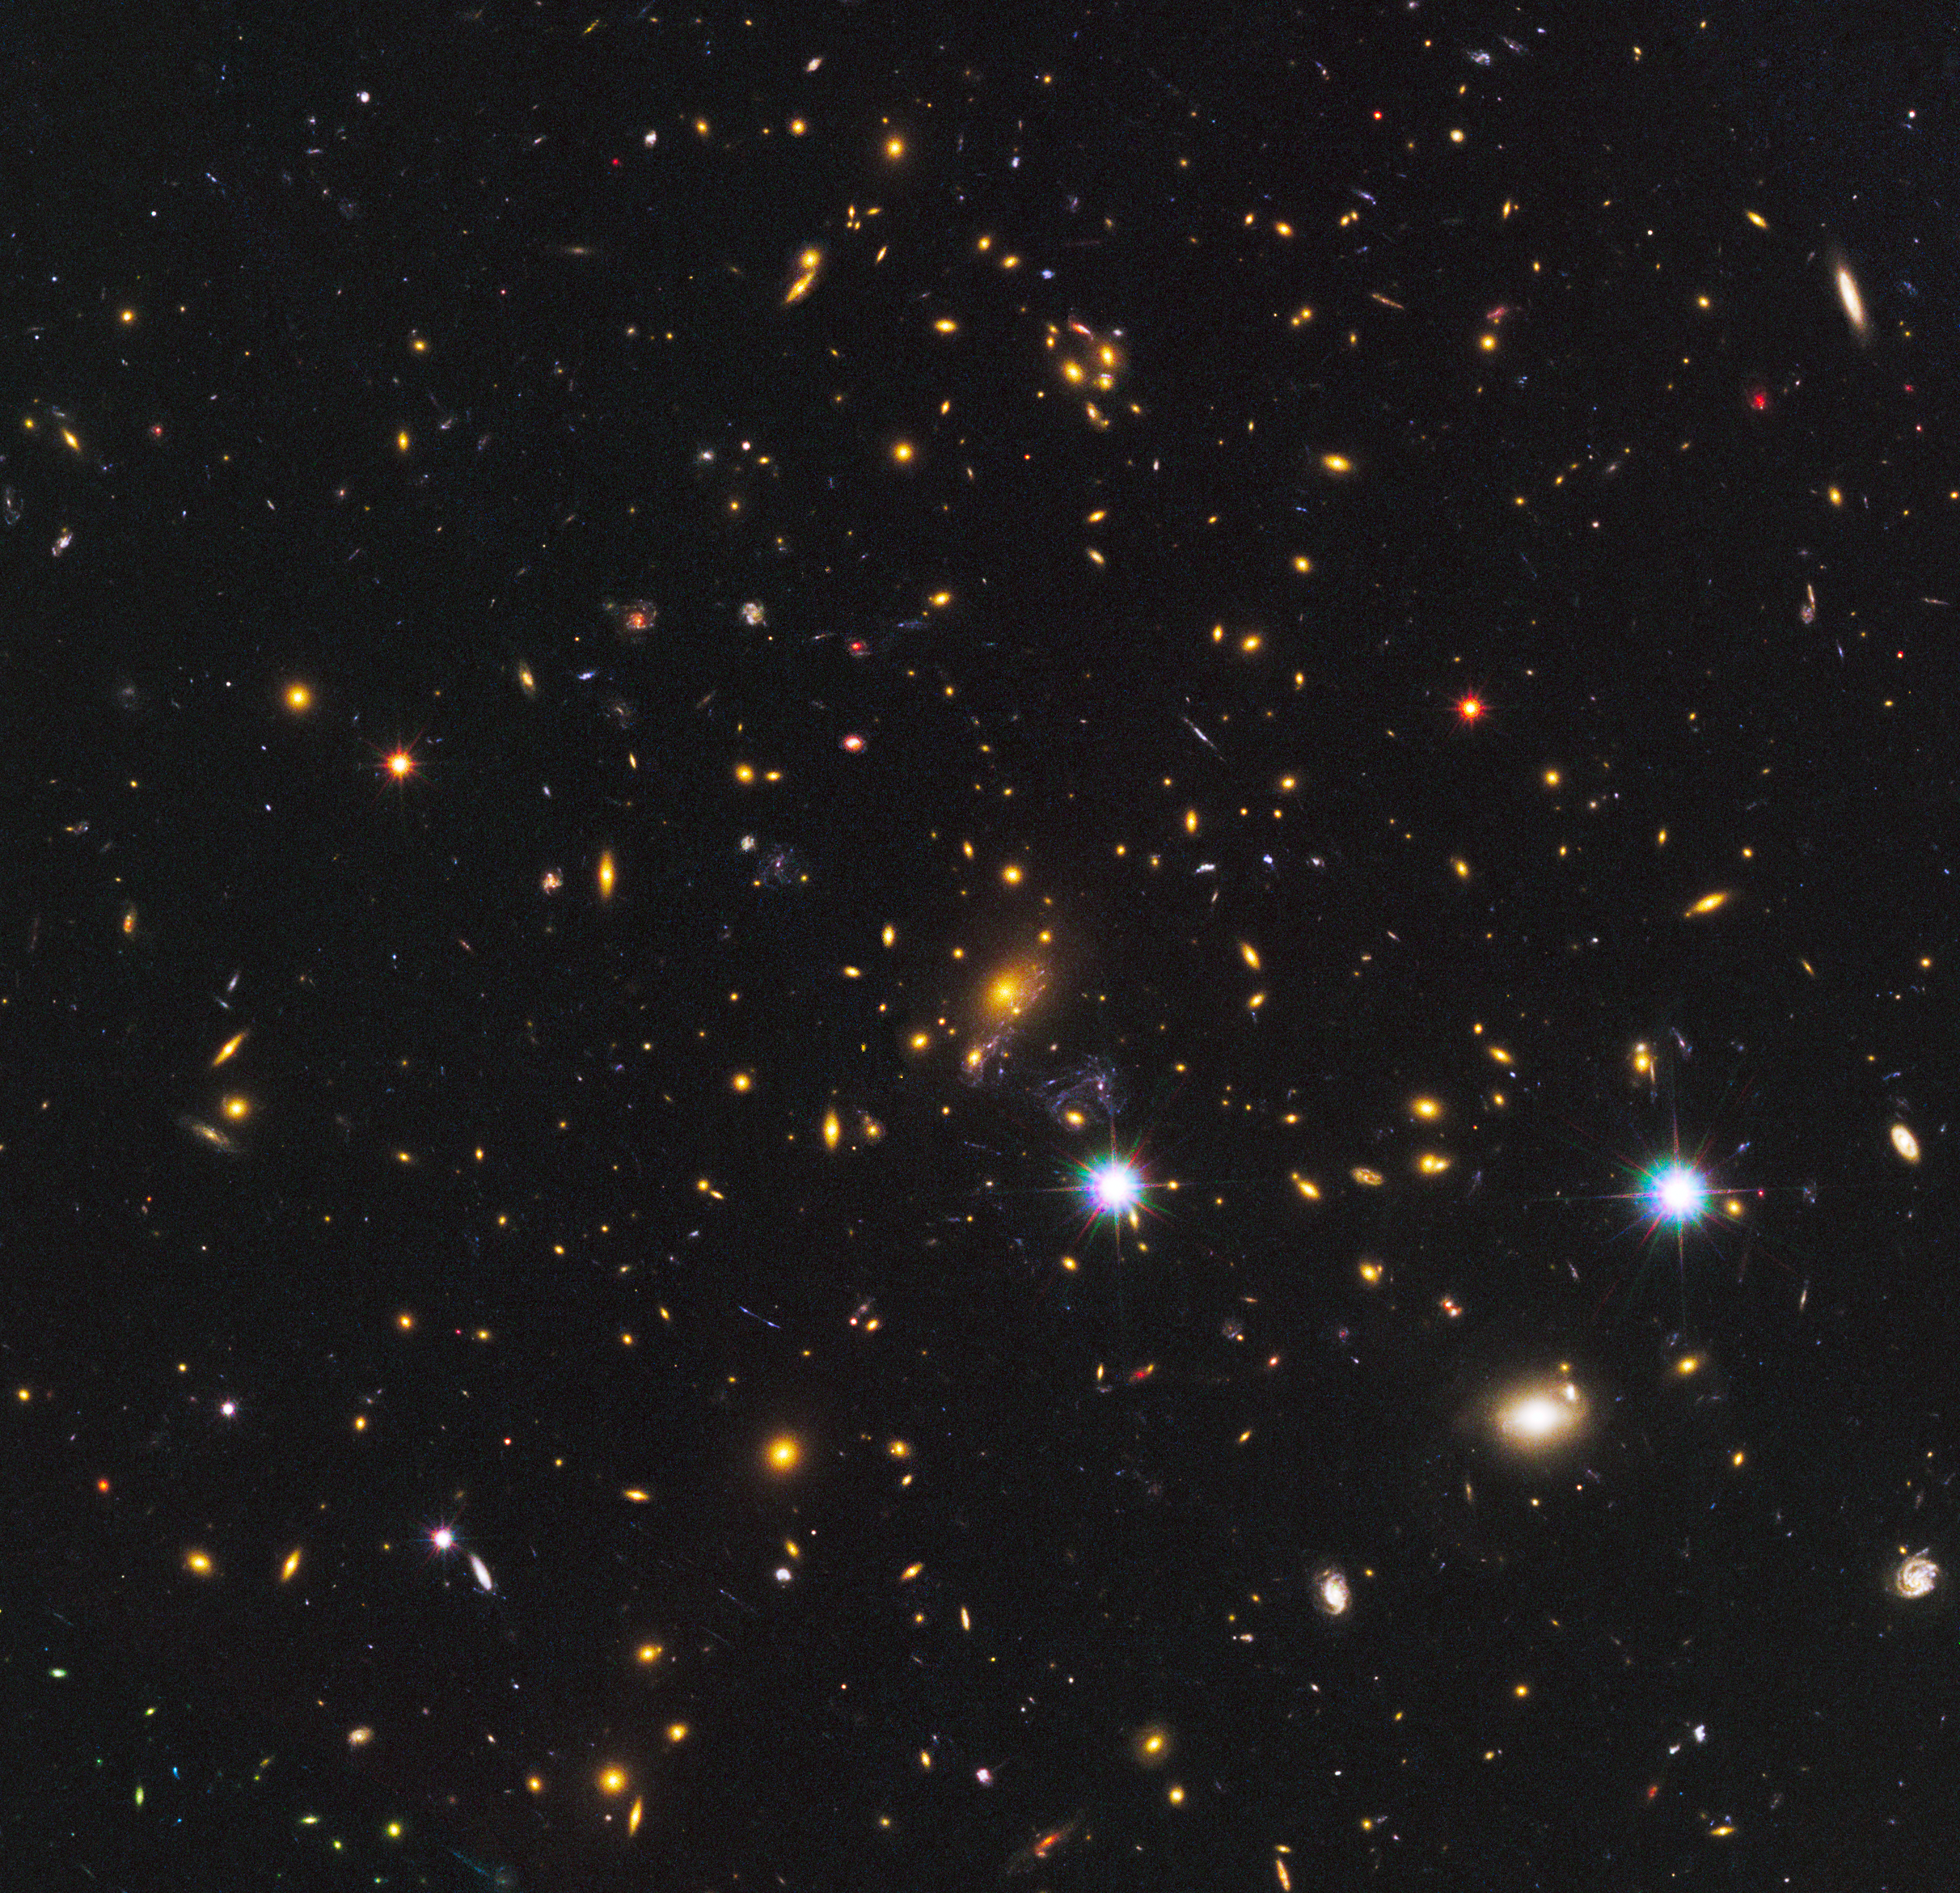

Galaxy cluster MACS J1149+2223

In this image the many galaxies of the massive cluster MACS J1149+2223 dominate the scene. This cluster played an important role in discovery of the newfound galaxy, known as MACS1149-JD. Gravitational lensing by this giant cluster brightened the light from the galaxy some 15 times, a galaxy which may be the most distant ever observed. For more detailed images of the galaxy see here.

Credit: NASA, ESA, W. Zheng (JHU), M. Postman (STScI), and the CLASH Team